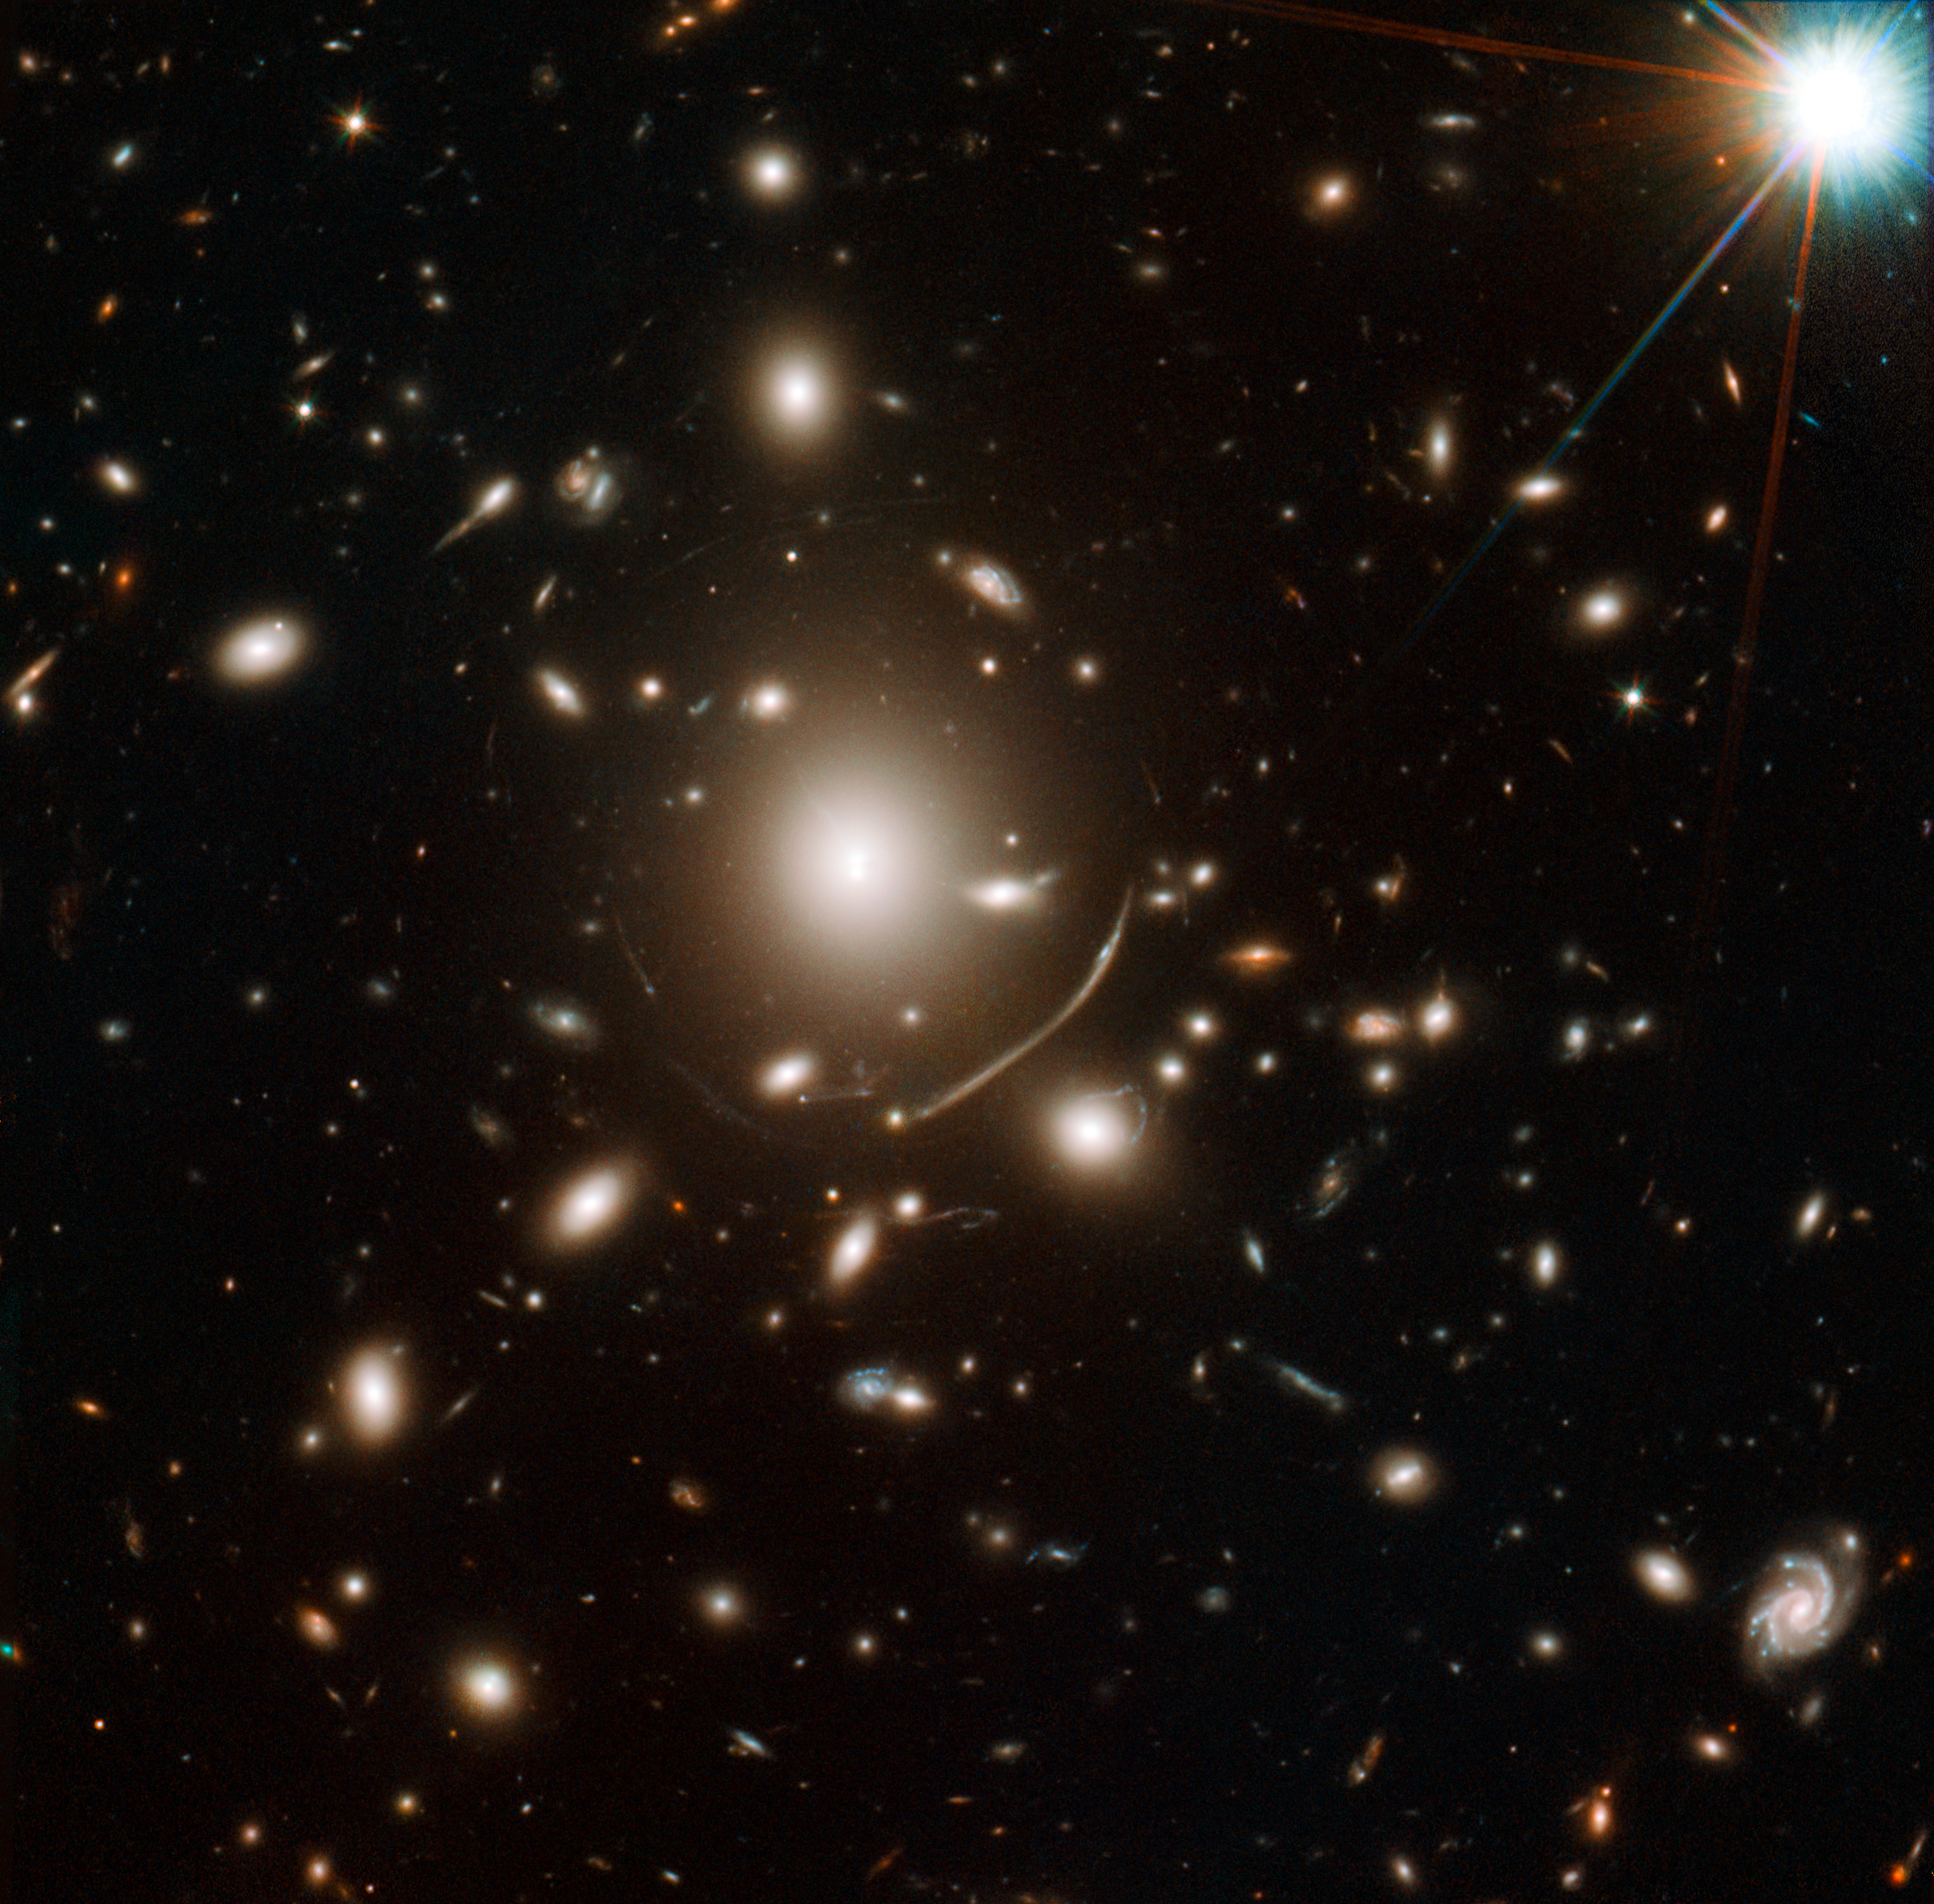

Lensing cluster Abell 383

The giant galaxy cluster in the centre of this image contains so much dark matter mass that its gravity bends the light of more distant objects. This means that for very distant galaxies in the background, the cluster’s gravitational field acts as a sort of magnifying glass, bending and concentrating the distant object’s light towards Hubble. These gravitational lenses are one tool astronomers can use to extend Hubble’s vision beyond what it would normally be capable of observing. This way some of the very first galaxies in the Universe can be studied by astronomers.

The lensing effect can also be used to determine the distribution of matter — both ordinary and dark matter — within the cluster.

Credit: NASA, ESA, J. Richard (CRAL) and J.-P. Kneib (LAM). Acknowledgement: Marc Postman (STScI)